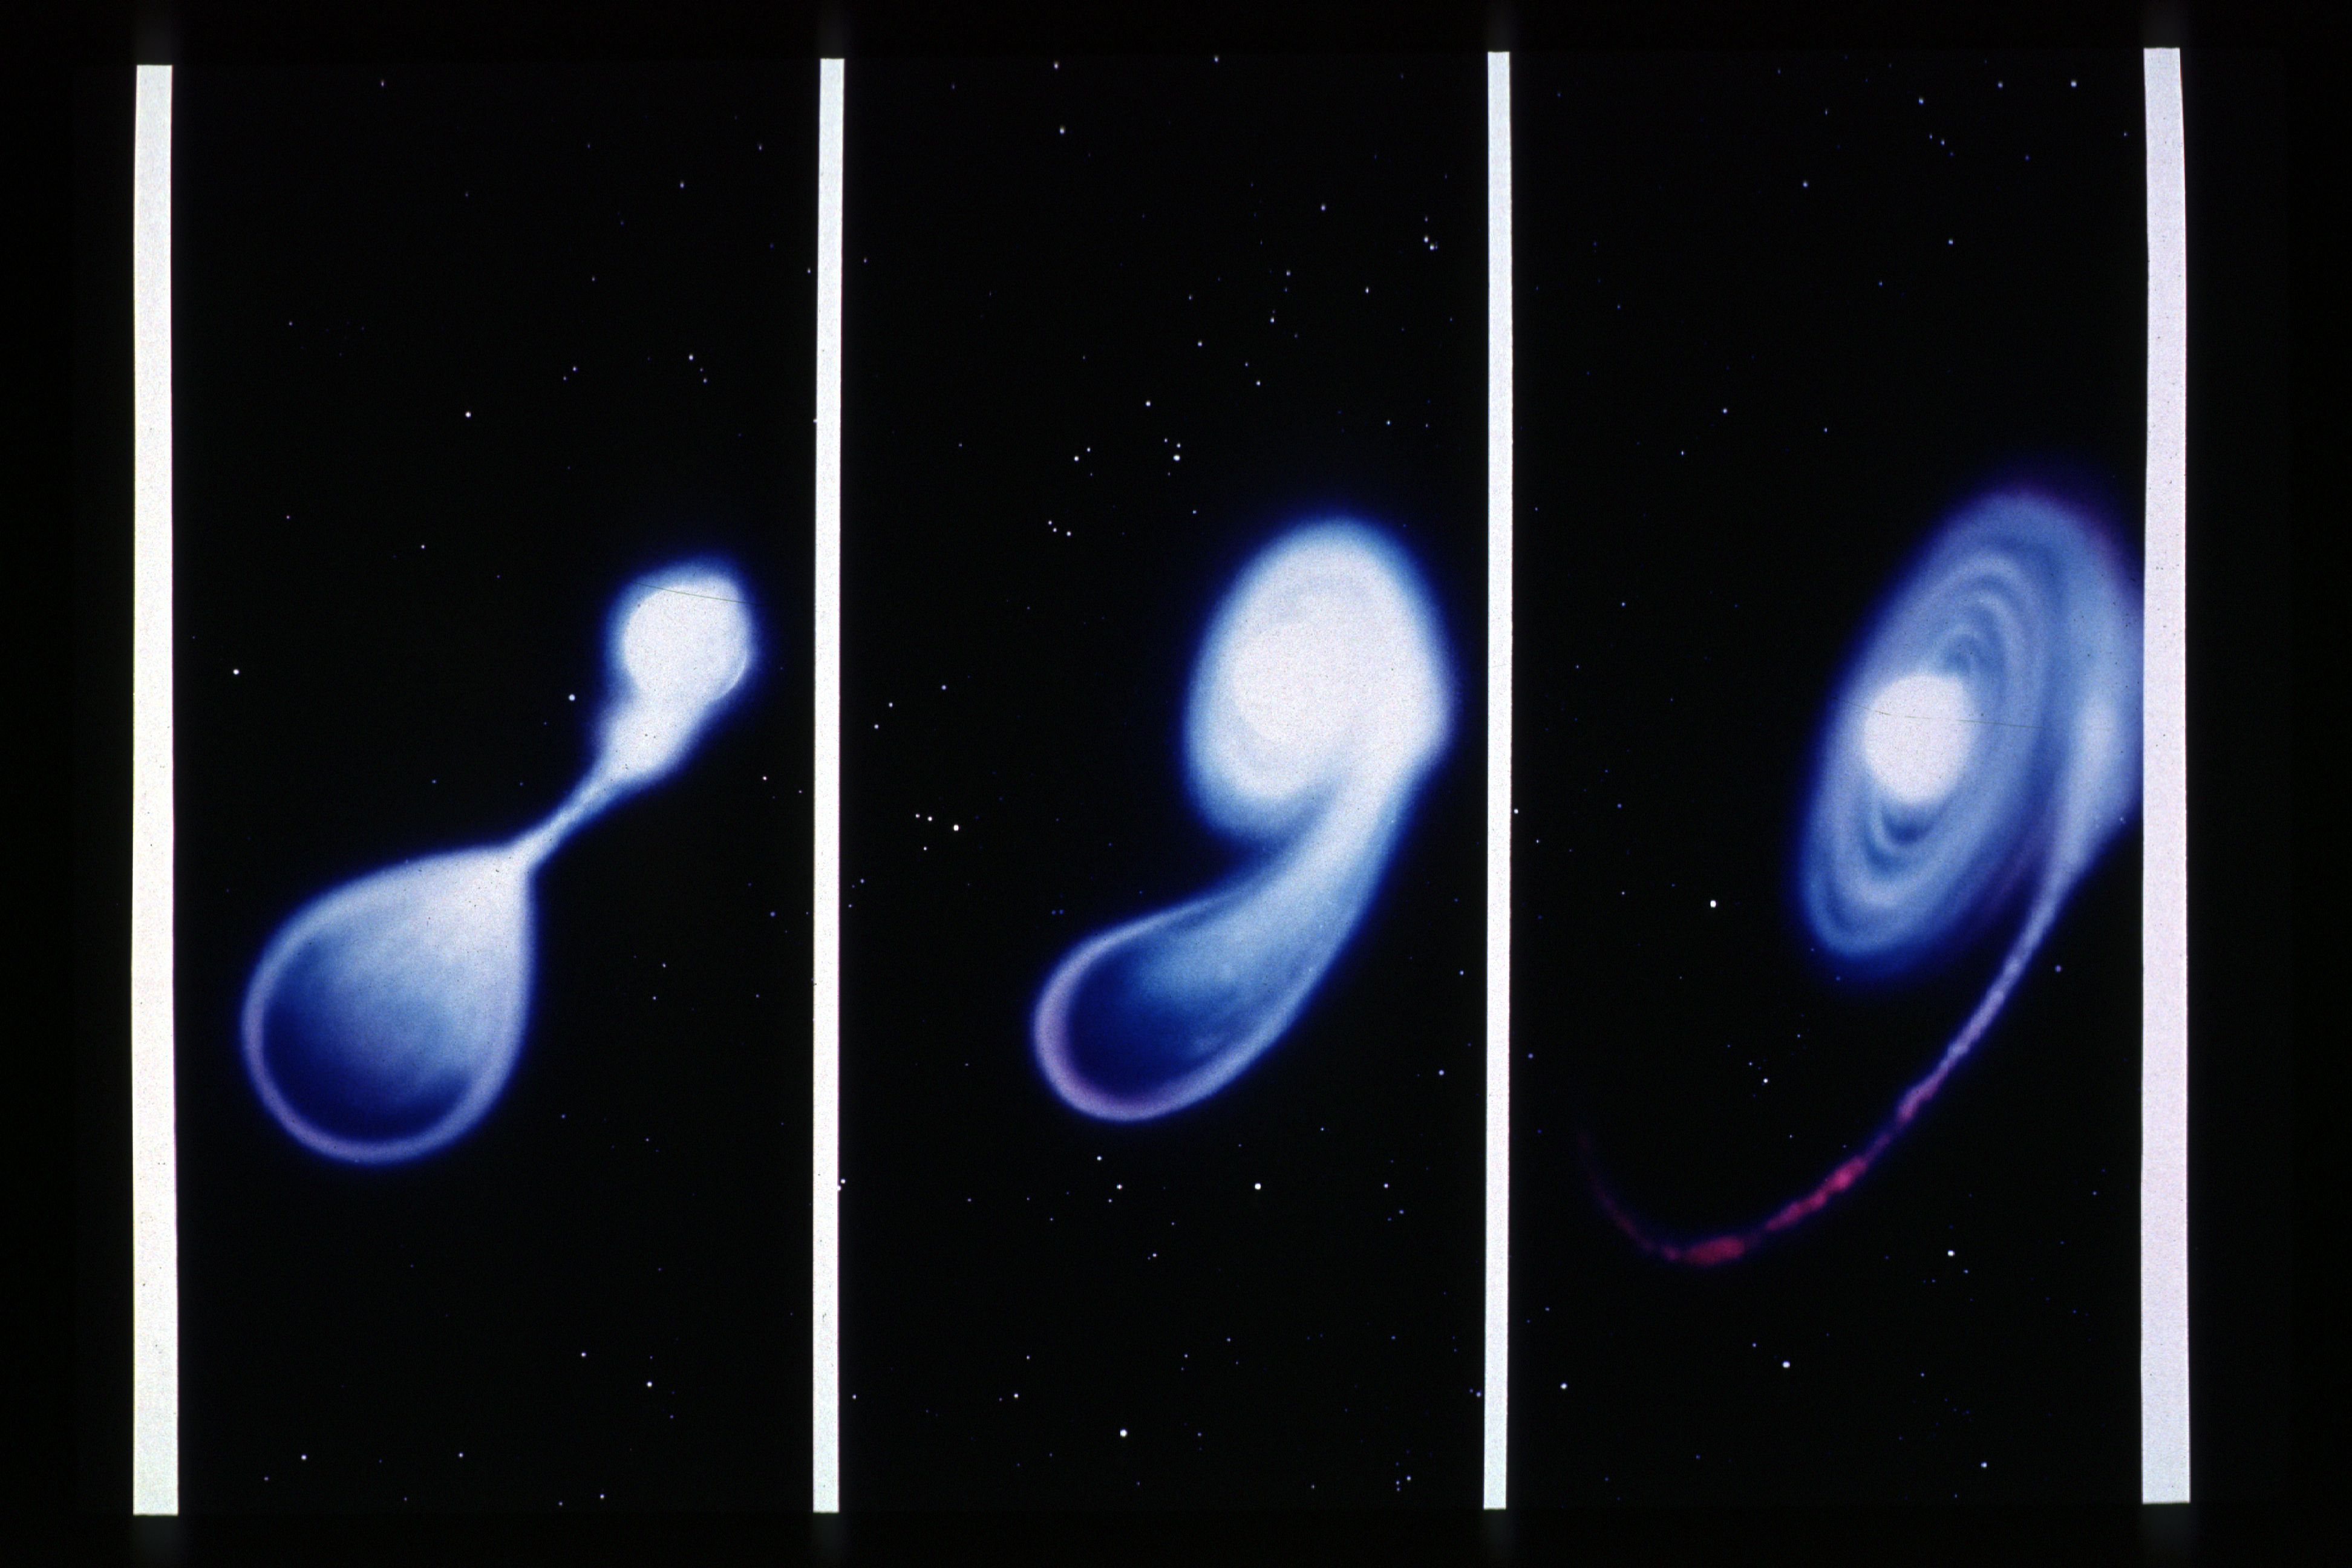

Merger of two white dwarf stars

This artist's illustration shows three steps in the merger of a pair of white dwarf stars. The illustration depicts how planets may form around massive white dwarfs and is based upon theoretical studies by astronomers Mario Livio, Jim Pringle, and Rex Saffer of the Space Telescope Science Institute in Baltimore, MD.

At least half of the stars in our Milky Way galaxy are double star systems. During their evolution such systems may undergo a phase in which the cores of the two stars revolve inside a tenuous common envelope. The end product of such a phase can be a close pair of very compact objects known as white dwarfs (white dwarfs are stars late in their evolution, which have contracted to the size of Earth but retain as much mass as the Sun).

Credit: Dana Berry, ST ScI Astronomy Visualization Laboratory